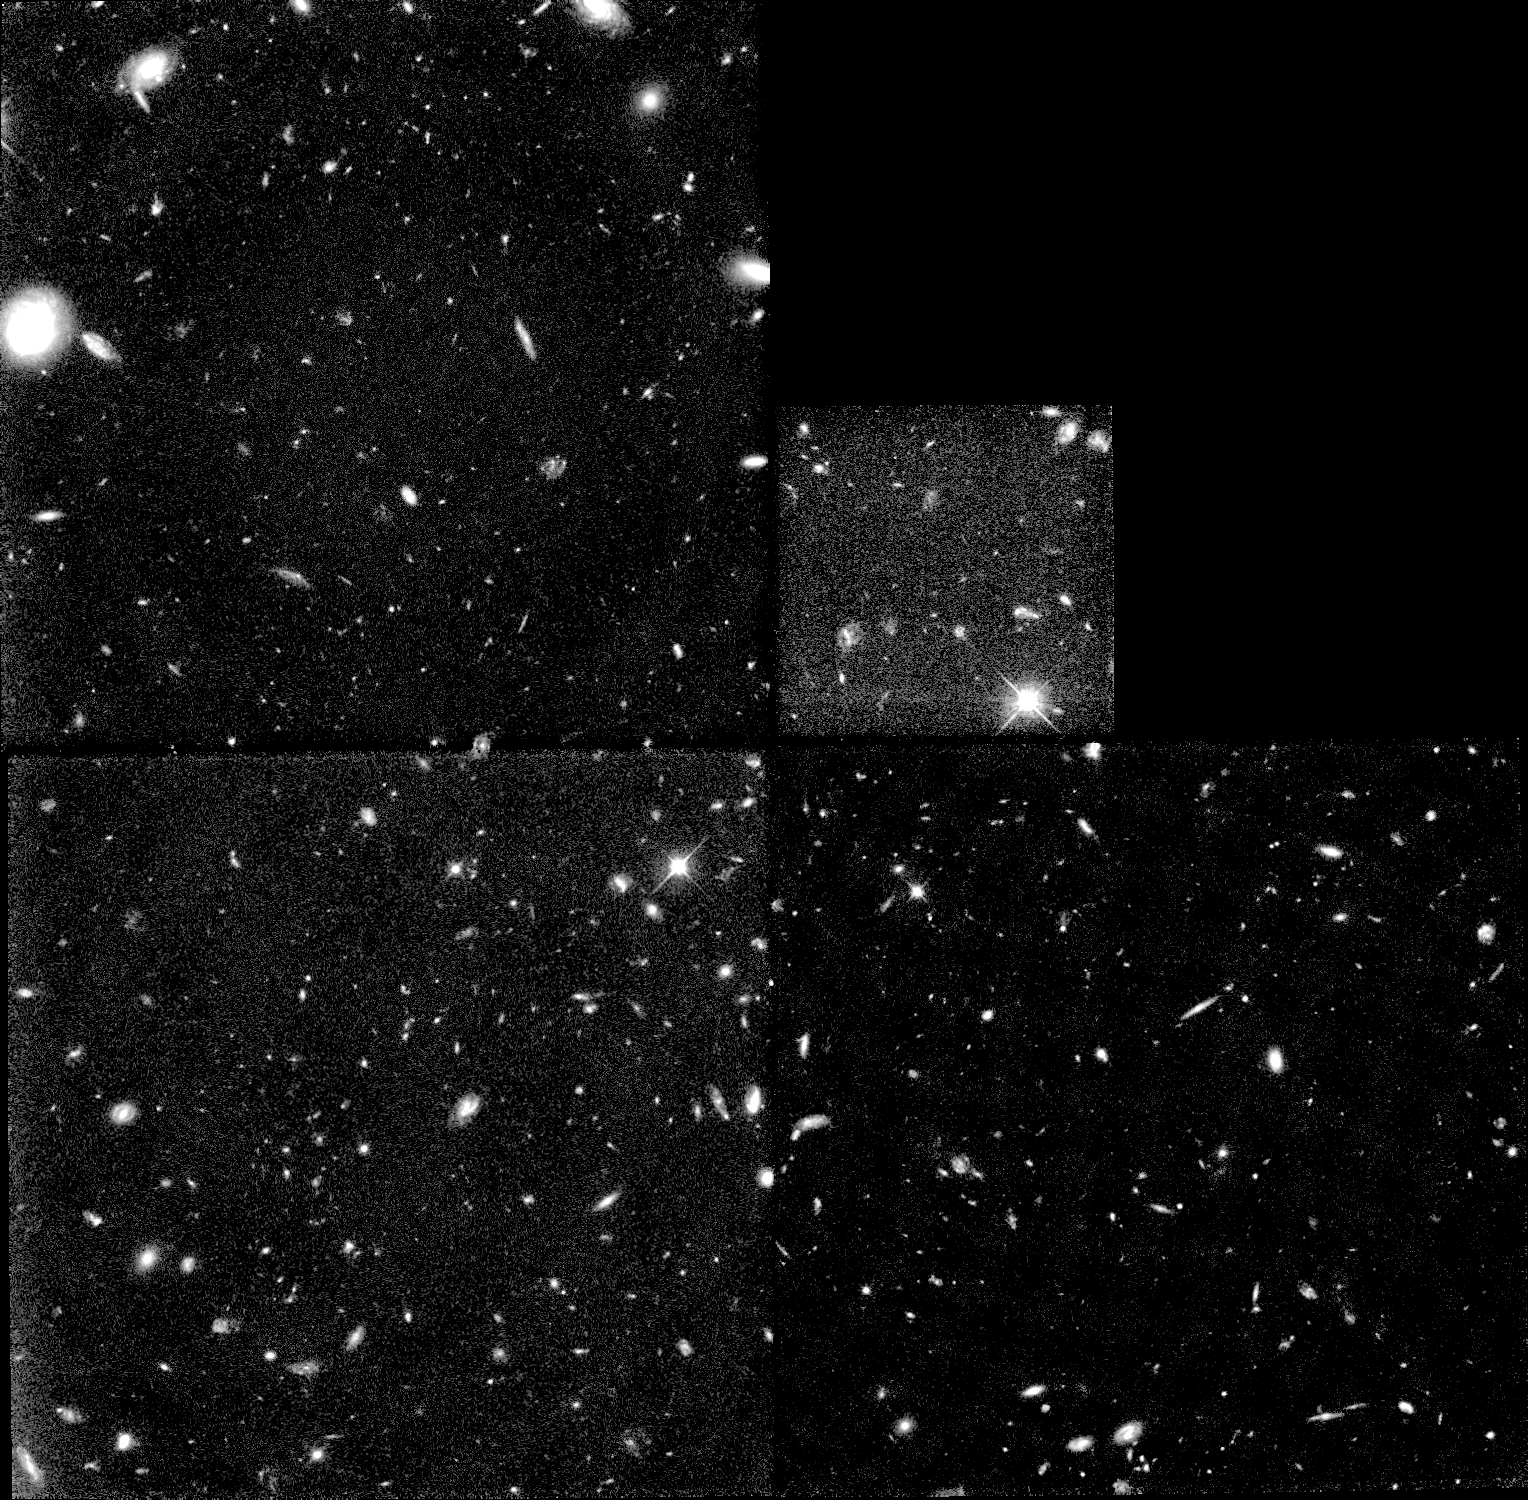

Galaxies: snapshots in time

Single images from the Galaxies: Snapshots in Time collage.

Credit: NASA & ESA